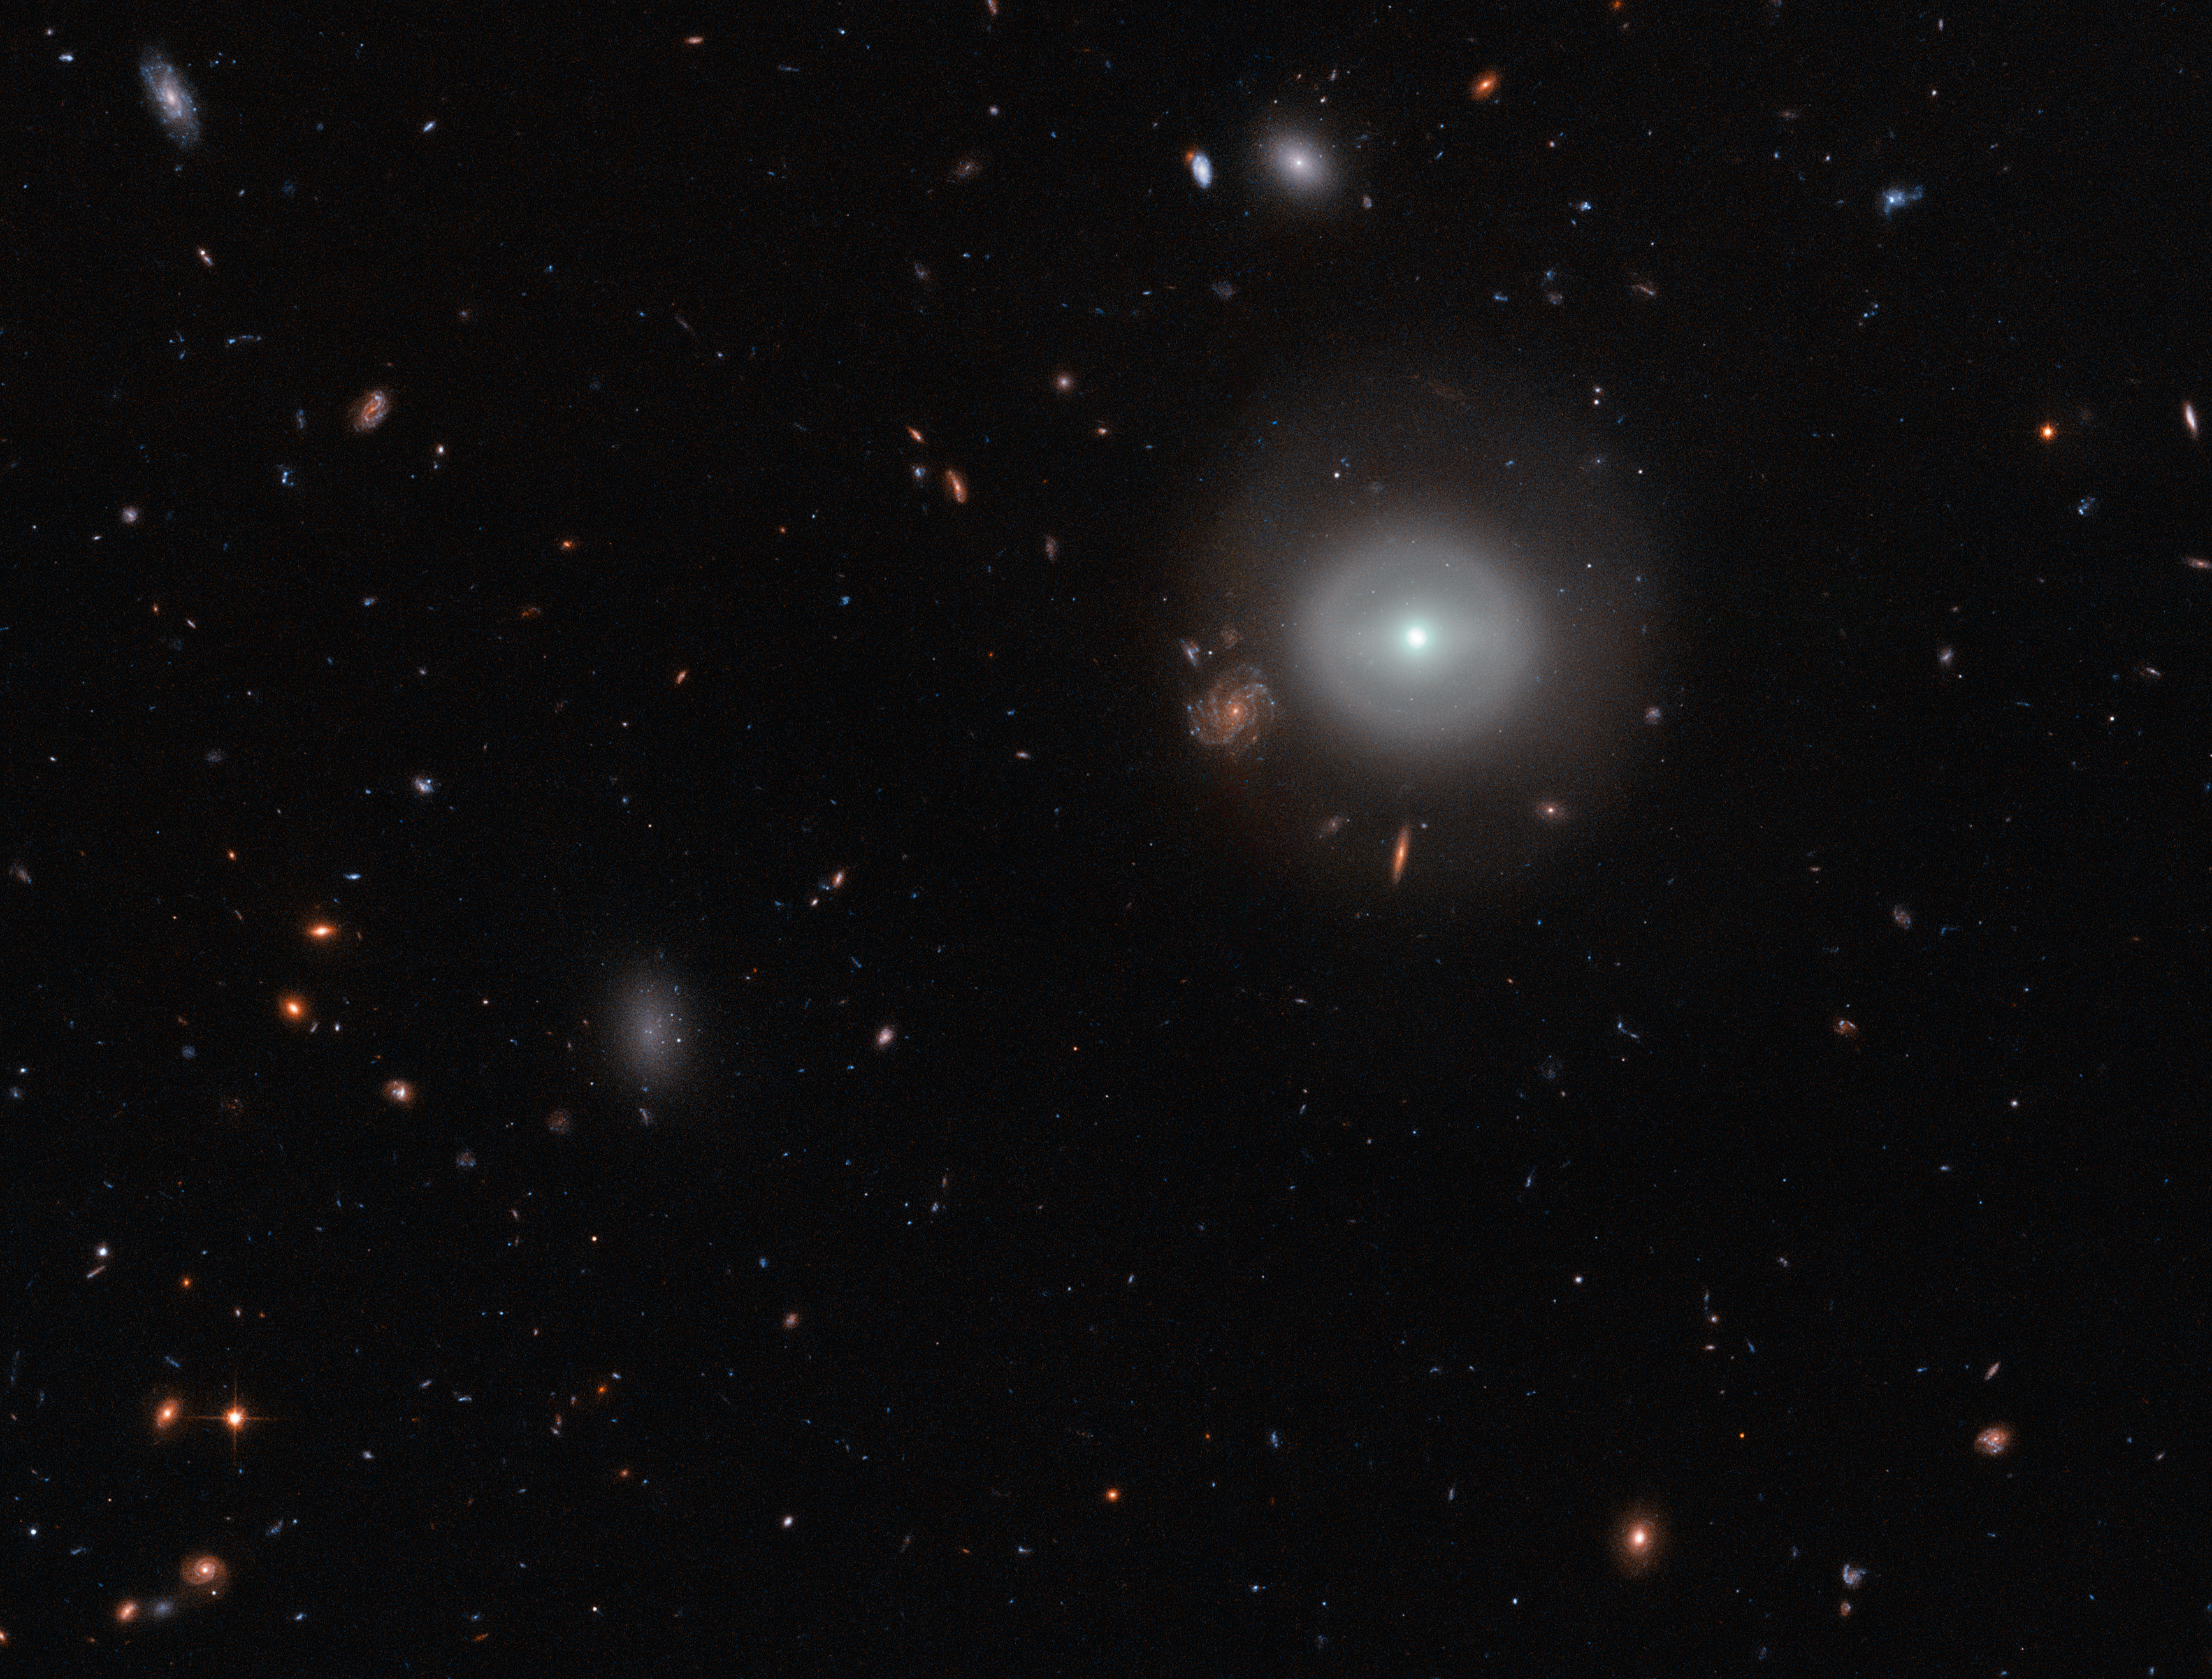

Standing out from the crowd

A lone source shines out brightly from the dark expanse of deep space, glowing softly against a picturesque backdrop of distant stars and colourful galaxies.

Captured by the NASA/ESA Hubble Space Telescope’s Advanced Camera for Surveys (ACS), this scene shows PGC 83677, a lenticular galaxy — a galaxy type that sits between the more familiar elliptical and spiral varieties in the Hubble sequence.

This image was obtained as part of the Coma Cluster Survey. It reveals both the relatively calm outskirts and intriguing core of PGC 83677. Here, studies have uncovered signs of a monstrous black hole that is spewing out high-energy X-rays and ultraviolet light.

Credit: ESA/Hubble & NASA
Acknowledgements: Judy Schmidt (Geckzilla)